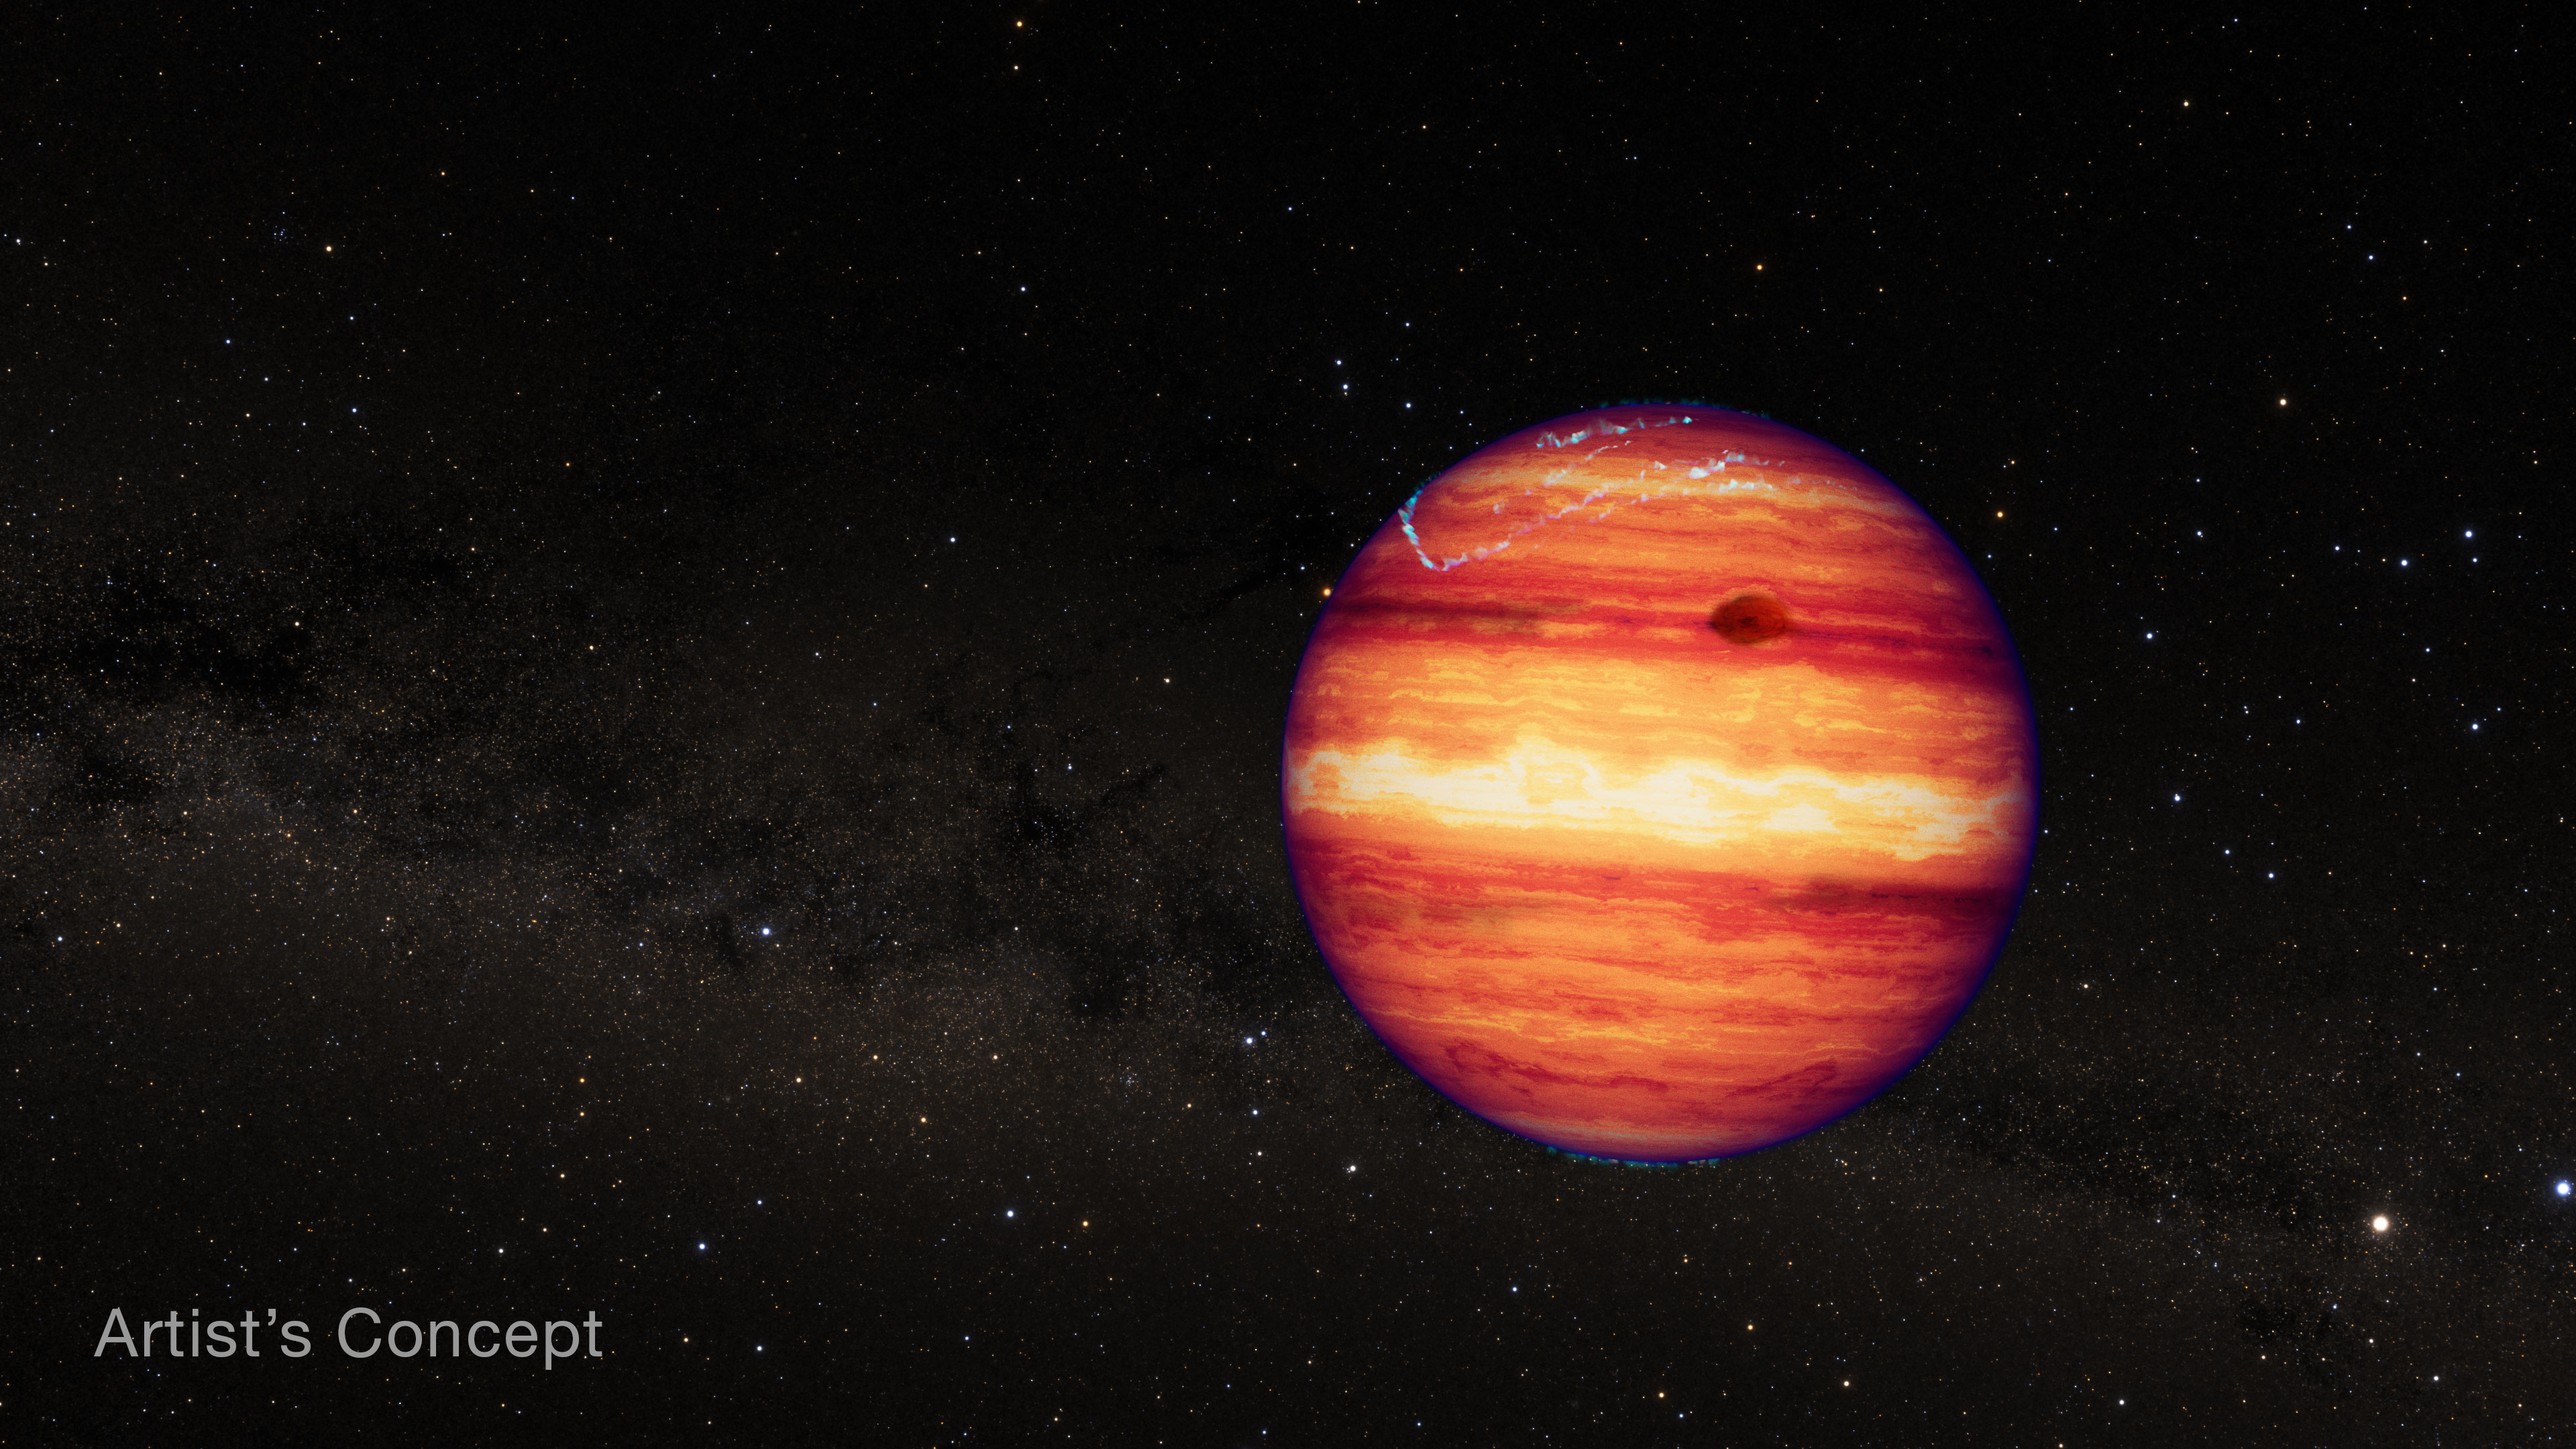

Isolated planetary-mass object SIMP 0136 (artist’s concept)

This artist’s concept shows what the isolated planetary-mass object SIMP 0136 could look like based on recent observations from the NASA/ESA/CSA James Webb Space Telescope.

SIMP 0136 has a mass about 13 times that of Jupiter. Although it is thought to have the structure and composition of a gas giant, it is not technically classified as an exoplanet because it doesn’t orbit its own star.

The colors shown in the illustration represent near-infrared light, which is invisible to human eyes. SIMP 0136 is relatively warm — about 825 degrees Celsius or 1,100 kelvins — but is not hot enough to give off enough visible light to see from Earth, and is not illuminated by a host star. The bluish glow near the poles represents auroral energy (light given off by electrons spiraling in a magnetic field) which has been detected at radio wavelengths.

Researchers used NIRSpec (Near-infrared Spectrograph) and MIRI (Mid-Infrared Instrument) to monitor the brightness of SIMP 0136 over two full rotations in July 2023. By analyzing the change in brightness of different wavelengths over time, researchers were able to detect variability in cloud cover at different depths, temperature variations in the high atmosphere, and changes in carbon chemistry as different sides of the object rotated in and out of view.

SIMP 0136 is located within the Milky Way, about 20 light-years from Earth, in the constellation Pisces. It is the brightest isolated planet or brown dwarf visible from the Northern Hemisphere, and is thought to be about 200 million years old. This illustration is based on spectroscopic observations. Webb has not captured a direct image of the object.

Credit: NASA, ESA, CSA, J. Olmsted (STScI)